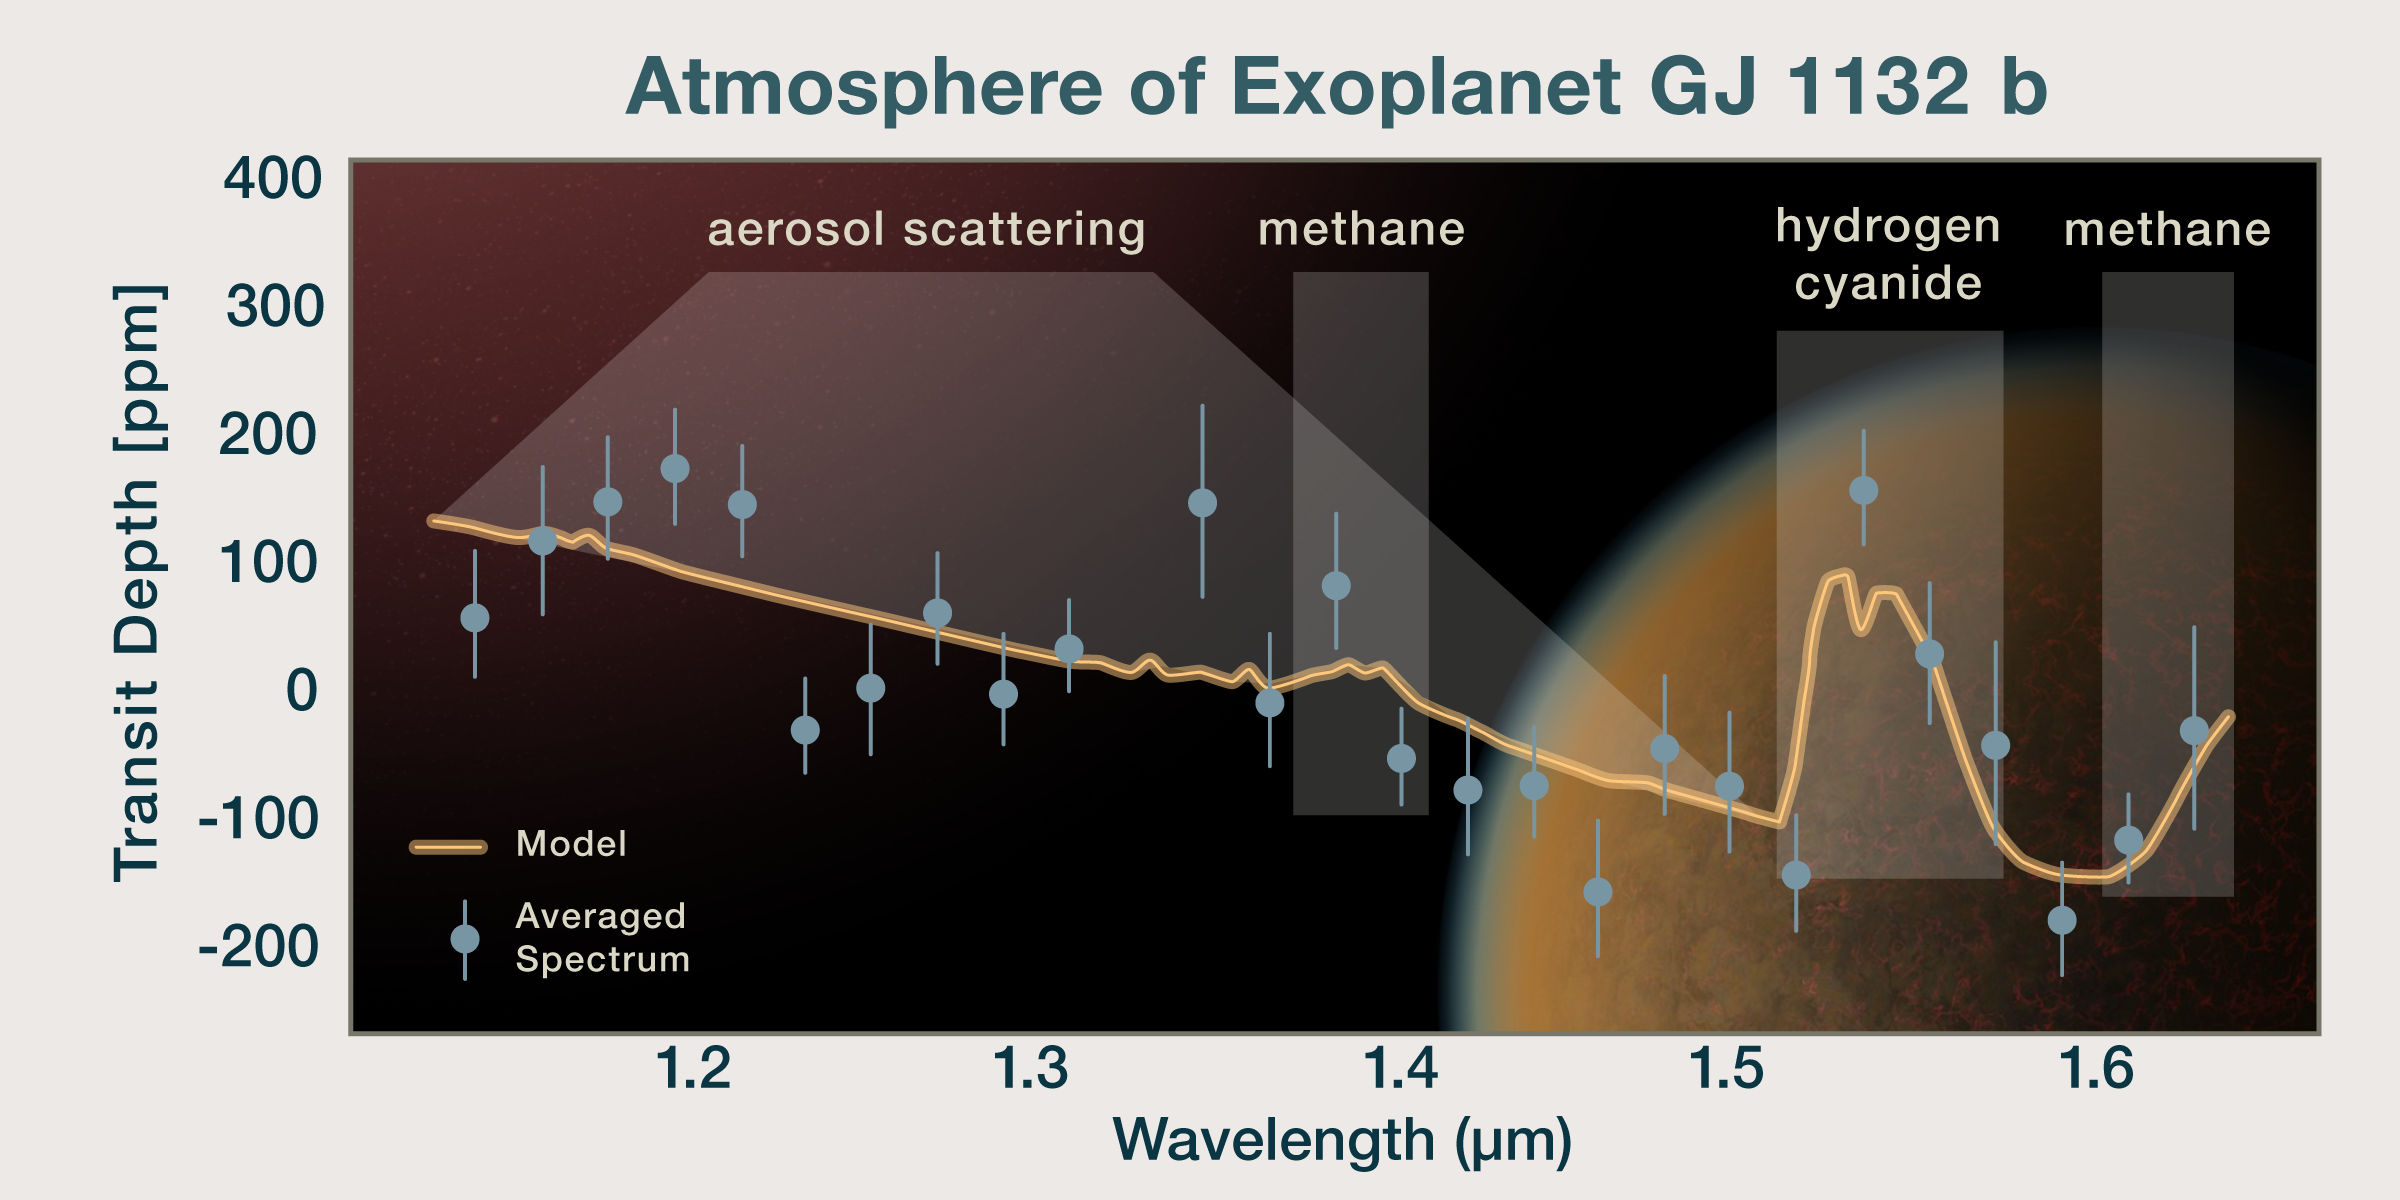

GJ 1132 b’s Spectrum

This plot shows the spectrum of the atmosphere of an Earth sized rocky exoplanet, GJ 1132 b, which is overlaid on an artist's impression of the planet.

The orange line represents the model spectrum. In comparison, the observed spectrum is shown as blue dots representing averaged data points, along with their error bars.

This analysis is consistent with GJ 1132 b being predominantly a hydrogen atmosphere with a mix of methane and hydrogen cyanide. The planet also has aerosols which cause scattering of light.

This is the first time a so-called “secondary atmosphere,” which was replenished after the planet lost its primordial atmosphere, has been detected on a world outside of our solar system.

Credit: NASA, ESA, and P. Jeffries (STScI)